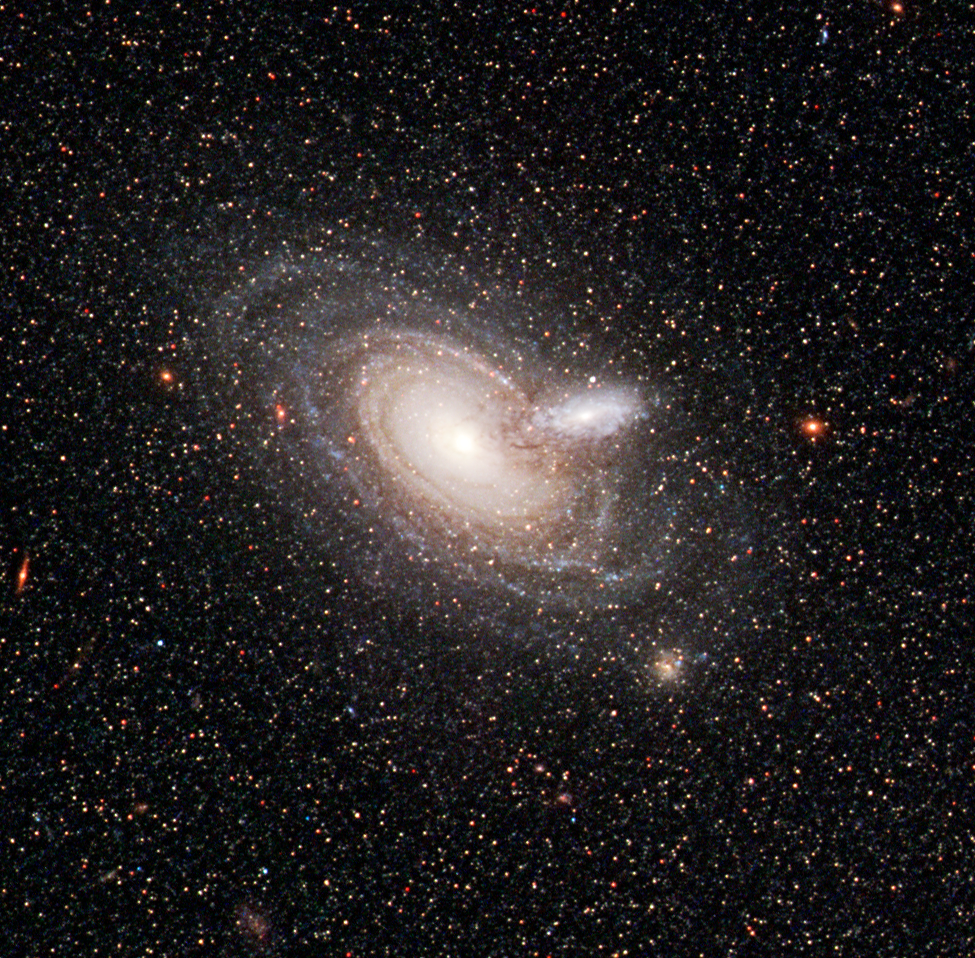

Galaxy Silhouettes

The NASA/ESA Hubble Space Telescope has captured a rare alignment between two spiral galaxies. The outer rim of a small, foreground galaxy is silhouetted in front of a larger background galaxy. Skeletal tentacles of dust can be seen extending beyond the small galaxy's disk of starlight. From ground-based telescopes, the two galaxies look like a single blob. But the Advanced Camera's sharp "eye" distinguished the blob as two galaxies, cataloged as 2MASX J00482185-2507365. The images were taken on 19 September, 2006.

Credit: NASA, ESA, and the Hubble Heritage Team (STScI/AURA)